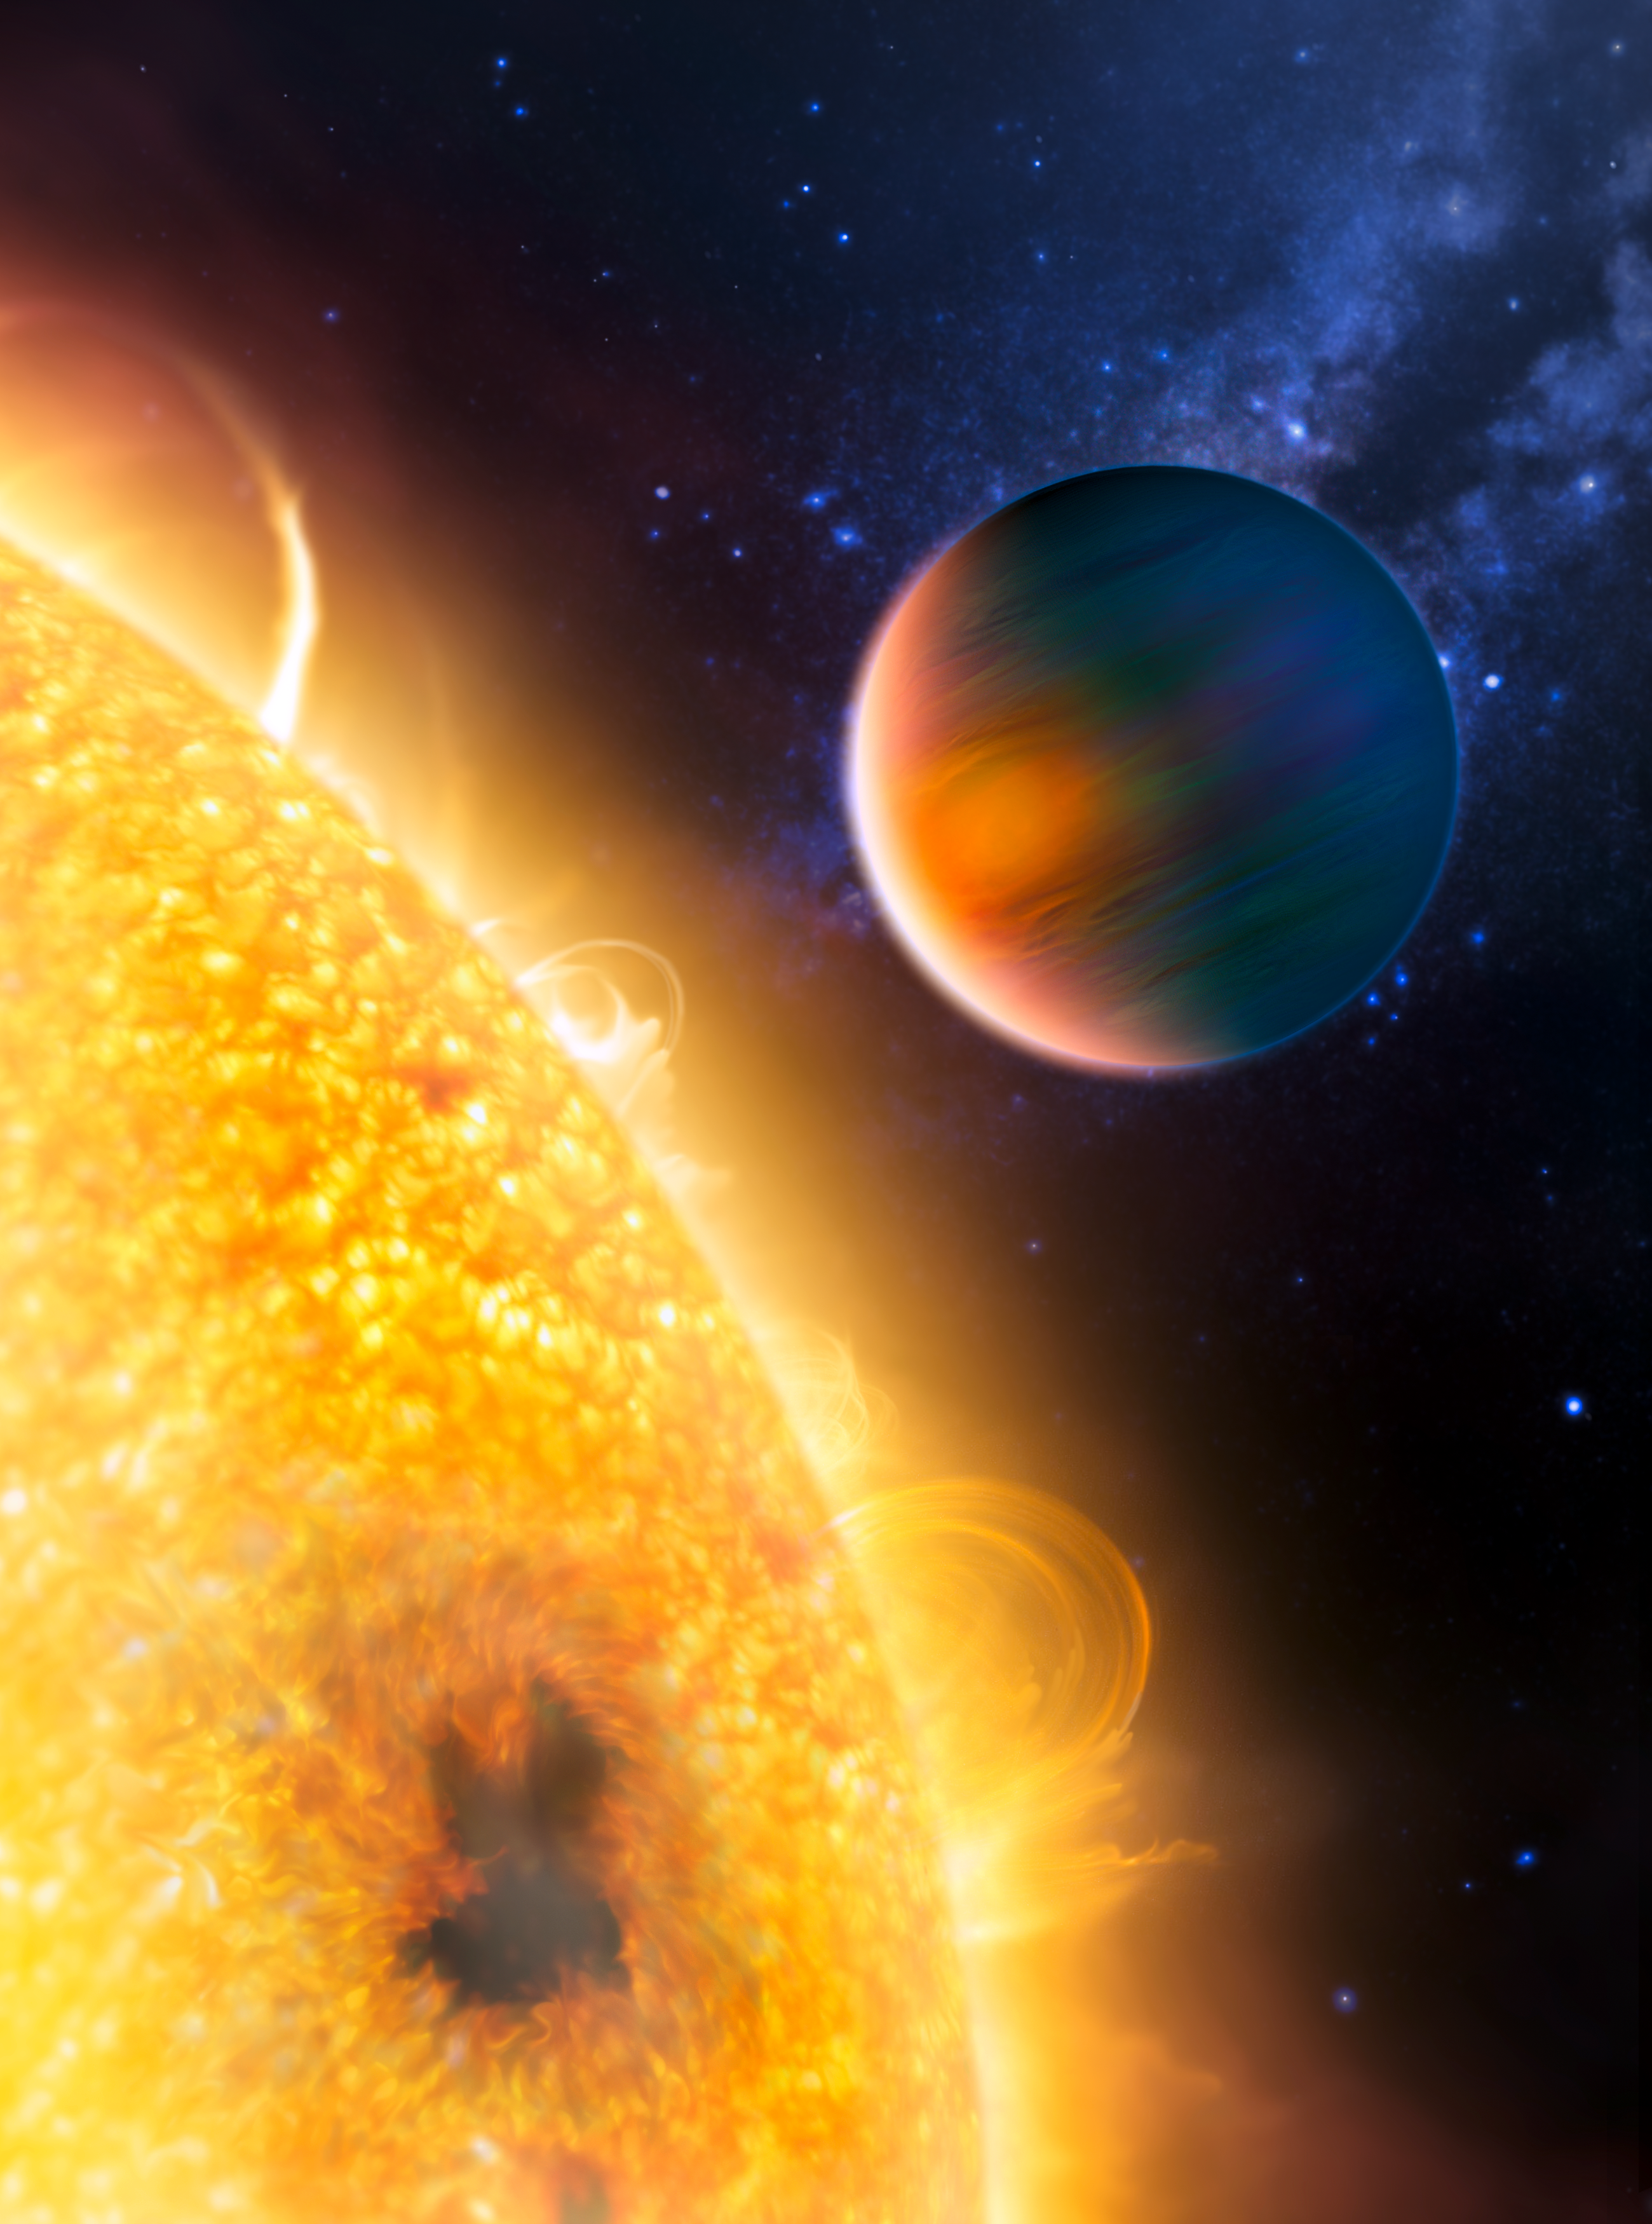

Artist's impression of the extrasolar planet HD 189733b

artist's impression of the extrasolar planet HD 189733b, now known to have methane and water. Astronomers used the Hubble Space Telescope to detect methane - the first organic molecule found on an extrasolar planet. Hubble also confirmed the presence of water vapour in the Jupiter-size planet's atmosphere, a discovery made in 2007 with the help of the Spitzer Space Telescope. They made the finding by studying how light from the host star filters through the planet's atmosphere.

Credit: ESA, NASA, G. Tinetti (University College London, UK & ESA) and M. Kornmesser (ESA/Hubble)